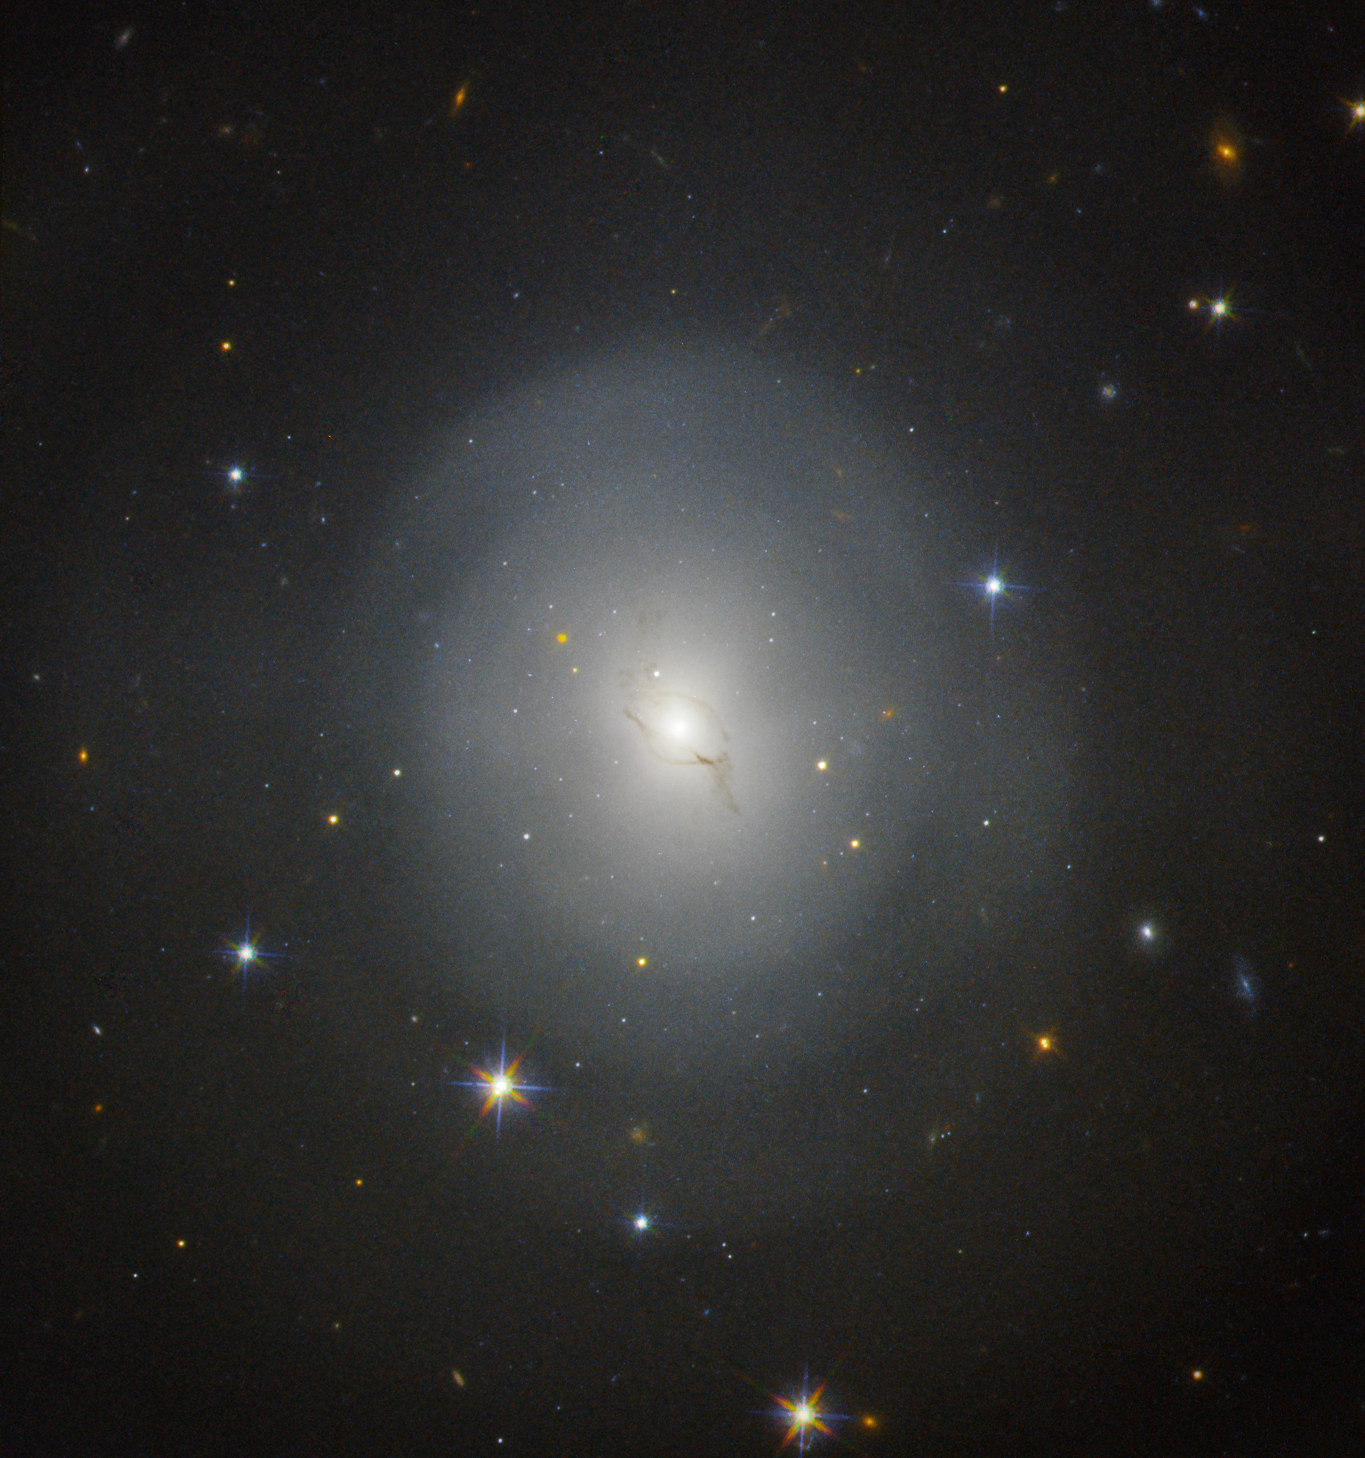

NGC 4993 seen with Hubble

The lenticular galaxy NGC 4993 is located about 130 million light-years from Earth. On 17 August 2017 the Laser Interferometer Gravitational-Wave Observatory (LIGO) and the Virgo Interferometer both detected gravitational waves from the collision of two neutron stars within this galaxy. The event also resulted in a flare of light, called a kilonova, which is visible to the upper left of the galactic centre in this image from the NASA/ESA Hubble Space Telescope.

Credit: NASA and ESA